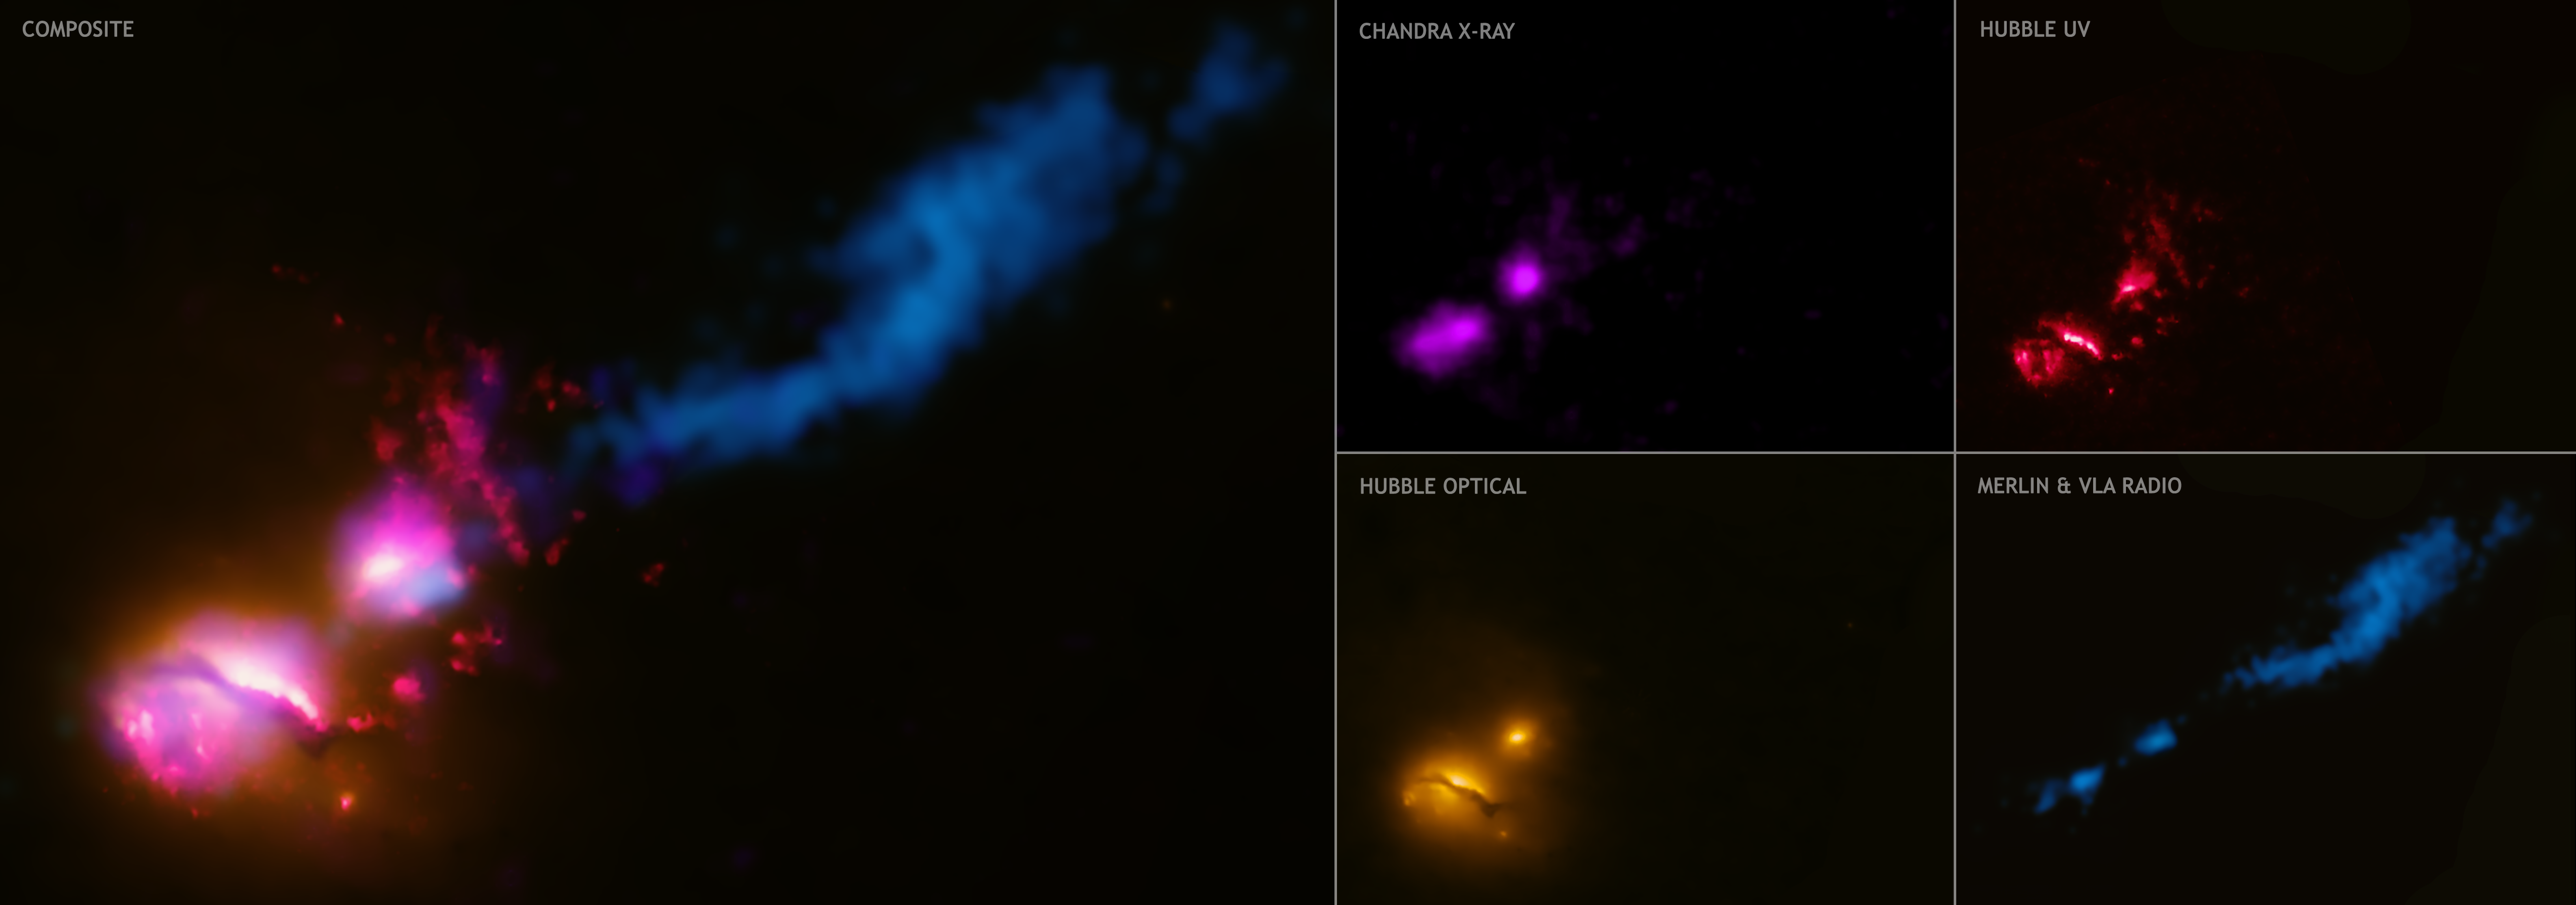

Multi-panel image of 3C 321

A powerful jet from a supermassive black hole is blasting a nearby galaxy in the system known as 3C 321, according to new results from NASA/ESA. This galactic violence, never seen before, could have a profound effect on any planets in the path of the jet and trigger a burst of star formation in the wake of its destruction.

Credit: X-ray: NASA/CXC/CfA/D.Evans et al.; Optical/UV: NASA/ESA/STScI; Radio: NSF/VLA/CfA/D.Evans et al., STFC/JBO/MERLIN